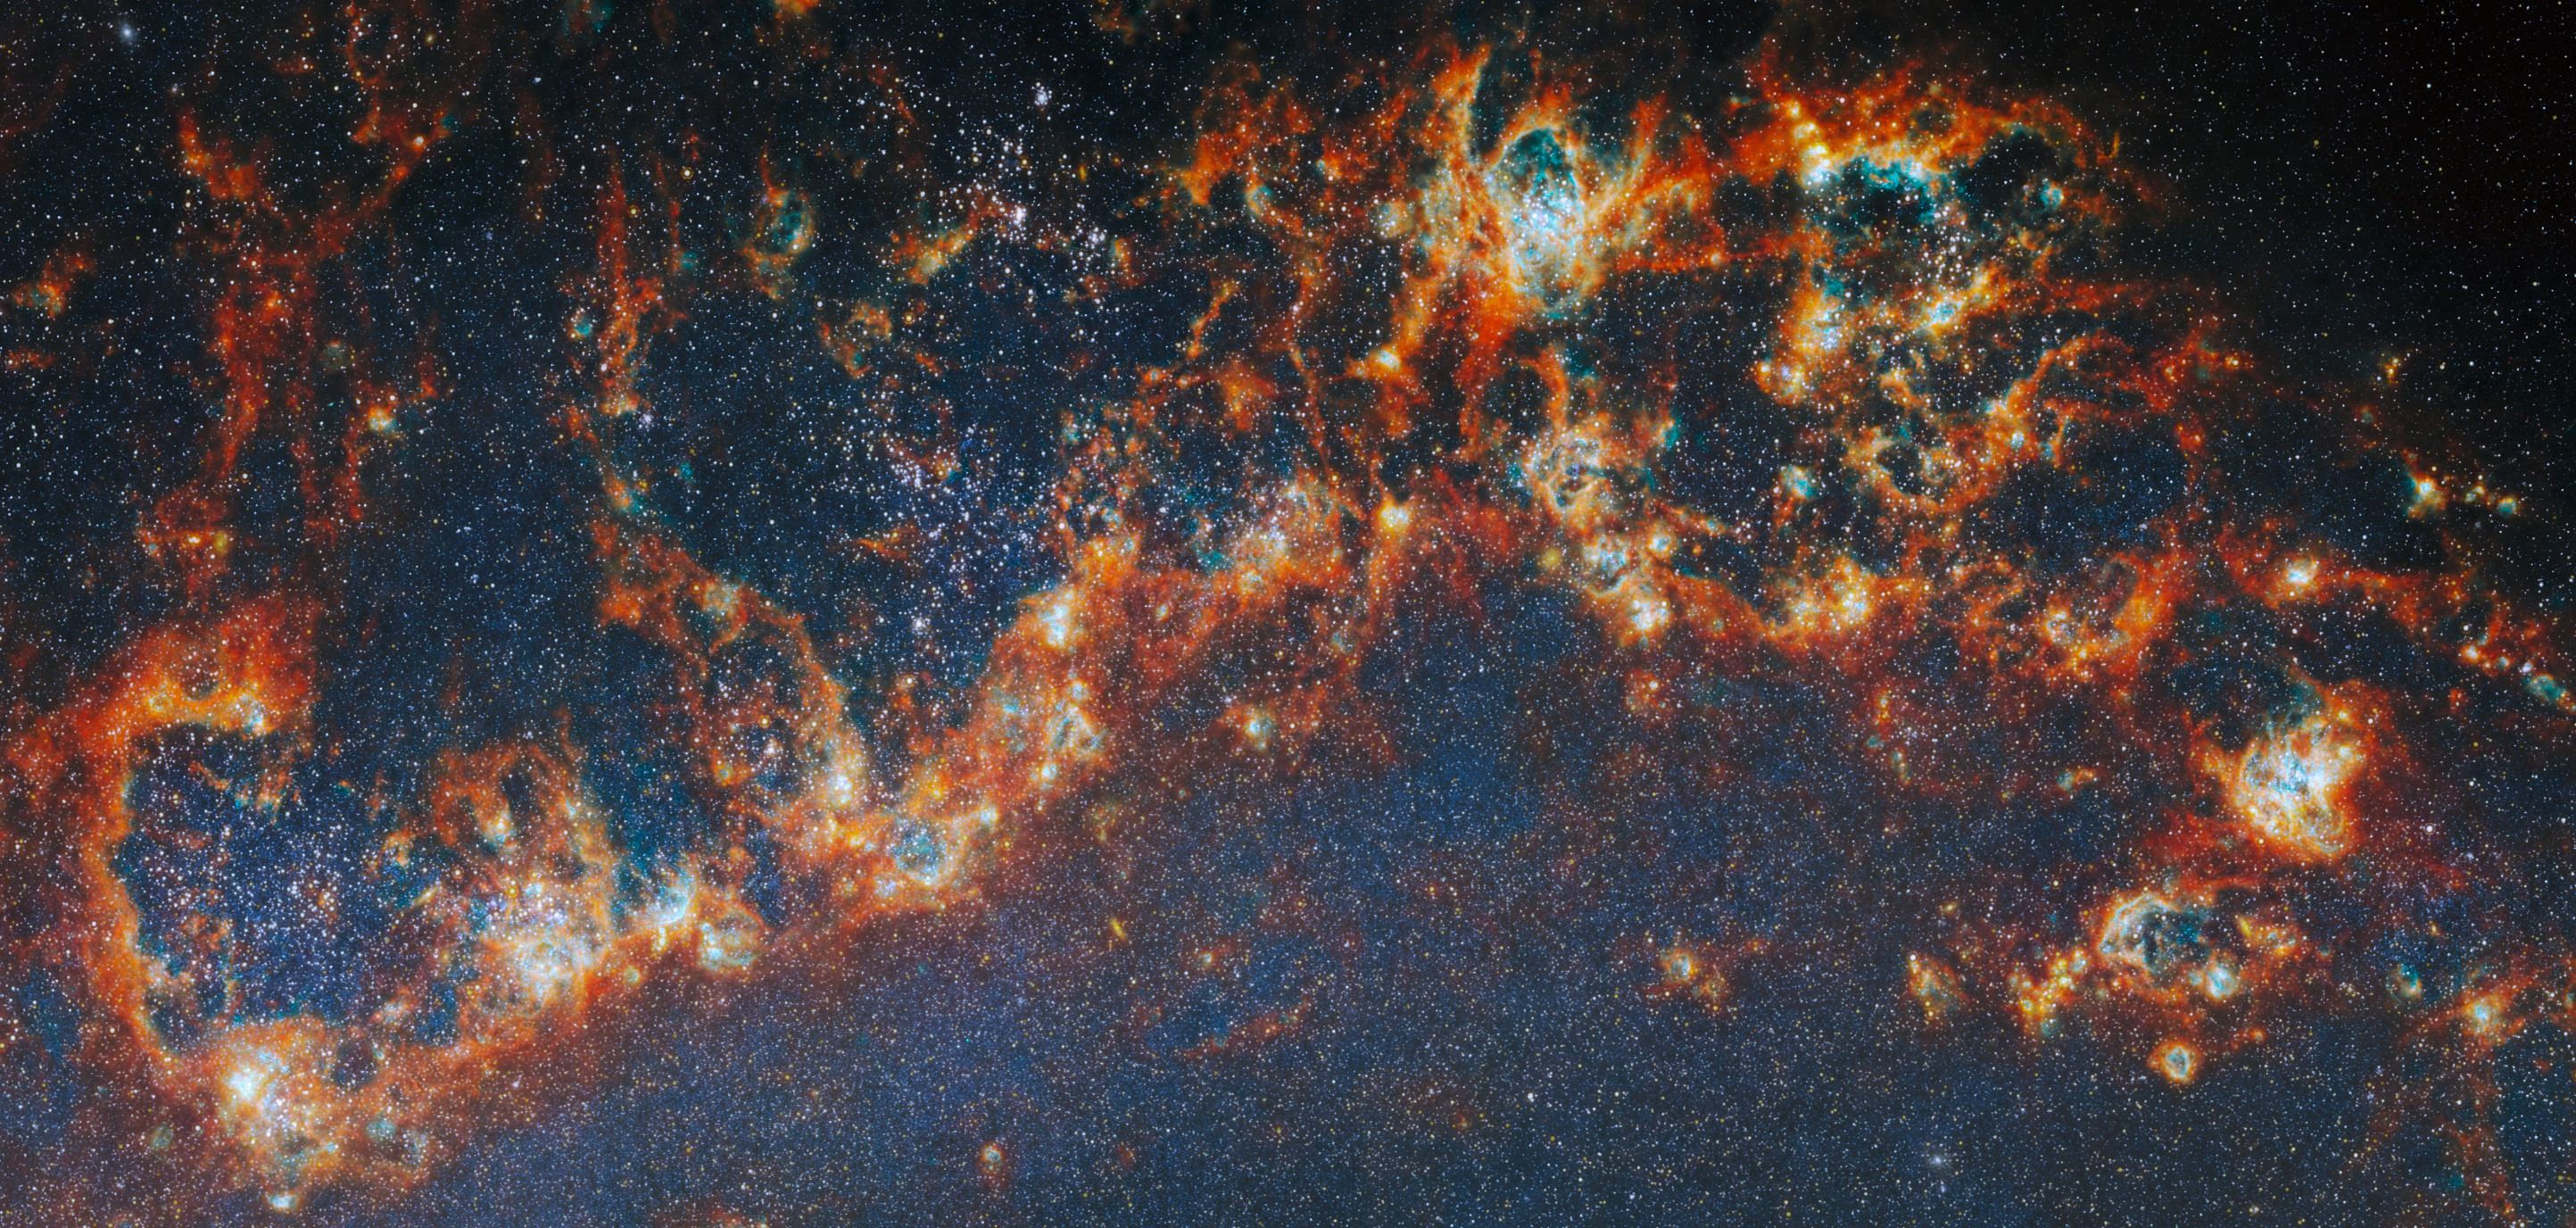

Star-forming regions in M51

Astronomers have long known that understanding how star clusters come to be is key to unlocking other secrets of galactic evolution. Stars form in clusters, created when clouds of gas collapse under gravity. As more and more stars are born in a collapsing cloud, strong stellar winds, harsh ultraviolet radiation and the supernova explosions of massive stars eventually disperse the cloud, and their light can bear down on other star-forming regions in the galaxy. This process is called stellar feedback, and it means that most of the gas in a galaxy never gets used for star formation. Researching how star clusters develop can answer questions about star formation at a galactic scale.

Now, the state of the art has been further developed with both Hubble and Webb working together to provide a broad-spectrum view of thousands of young star clusters. An international team of astronomers has pored over images of four nearby galaxies from the FEAST observing programme (#1783), trying to solve this mystery. Their results show that it is the most massive star clusters that clear away their gaseous shroud the fastest, and begin lighting their galaxy the earliest.

The team identified nearly 9000 star clusters in the four galaxies in different evolutionary stages: young clusters just starting to emerge from their natal clouds of gas, clusters that had partially dispersed the gas (both from Webb images), and fully unobstructed clusters visible in optical light (found in Hubble images). With Webb’s ability to peer inside the gas clouds, they were able to then estimate the mass and age of each cluster from its light spectrum.

This image shows a section of one of the spiral arms of Messier 51 (M51), one of the four galaxies studied in this work, as seen by Webb’s Near-Infrared Camera (NIRCam). The thick clumps of star-forming gas are shown here in red and orange, representing infrared light emitted by ionised gas, dust grains, and complex molecules such as polycyclic aromatic hydrocarbons (PAHs). Within these gas complexes, each tens or hundreds of light years across, Webb reveals the dense, extremely bright clusters of massive stars that have just recently formed. The countless stars strewn across the arm of the galaxy, many of which would be invisible to our eyes behind layers of dust, are also laid bare in infrared light.

Credit: ESA/Webb, NASA & CSA, A. Pedrini, A. Adamo (Stockholm University) and the FEAST JWST team